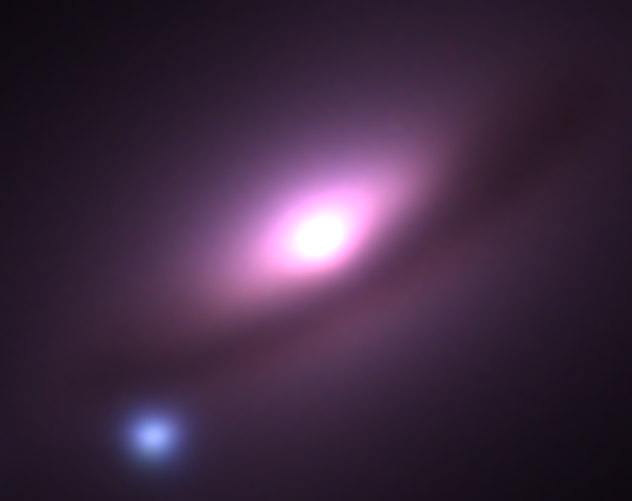

Ground-Based Image of Supernova 1994D in Galaxy NGC 4526

Supernovae are extremely luminous and cause a burst of radiation that often briefly outshines an entire galaxy, before fading from view over several weeks or months. During this short interval a supernova can radiate as much energy as the Sun is expected to emit over its entire life span.

Credit: NASA & ESA